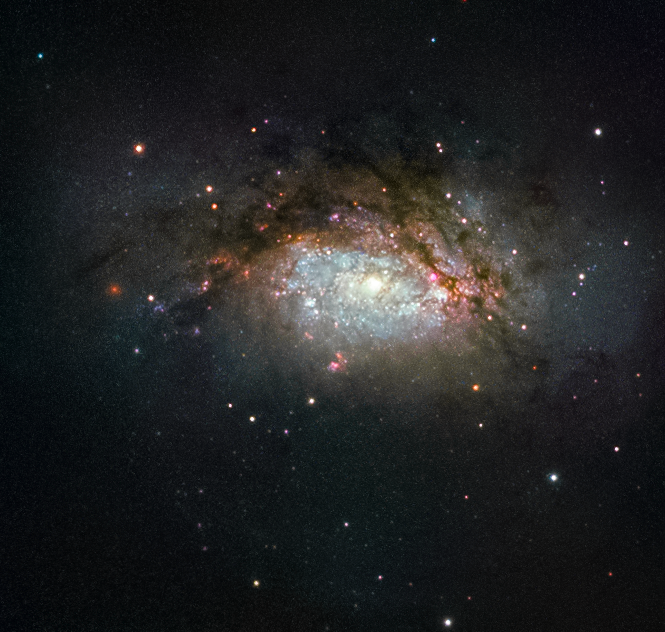

A galactic mega-merger

The subject of this NASA/ESA Hubble Space Telescope image is known as NGC 3597. It is the product of a collision between two good-sized galaxies, and is slowly evolving to become a giant elliptical galaxy. This type of galaxy has grown more and more common as the Universe has evolved, with initially small galaxies merging and progressively building up into larger galactic structures over time.

NGC 3597 is located approximately 150 million light-years away in the constellation of Crater (The Cup). Astronomers study NGC 3597 to learn more about how elliptical galaxies form — many ellipticals began their lives far earlier in the history of the Universe. Older ellipticals are nicknamed “red and dead” by astronomers because these bloated galaxies are not anymore producing new, bluer, stars in ages, and are thus packed full of old and redder stellar populations.

Before infirmity sets in, some freshly formed elliptical galaxies experience a final flush of youth, as is the case with NGC 3597. Galaxies smashing together pool their available gas and dust, triggering new rounds of star birth. Some of this material ends up in dense pockets initially called proto-globular clusters, dozens of which festoon NGC 3597. These pockets will go on to collapse and form fully-fledged globular clusters, large spheres that orbit the centres of galaxies like satellites, packed tightly full of millions of stars.

Credit: ESA/Hubble & NASA Acknowledgement: Judy Schmidt